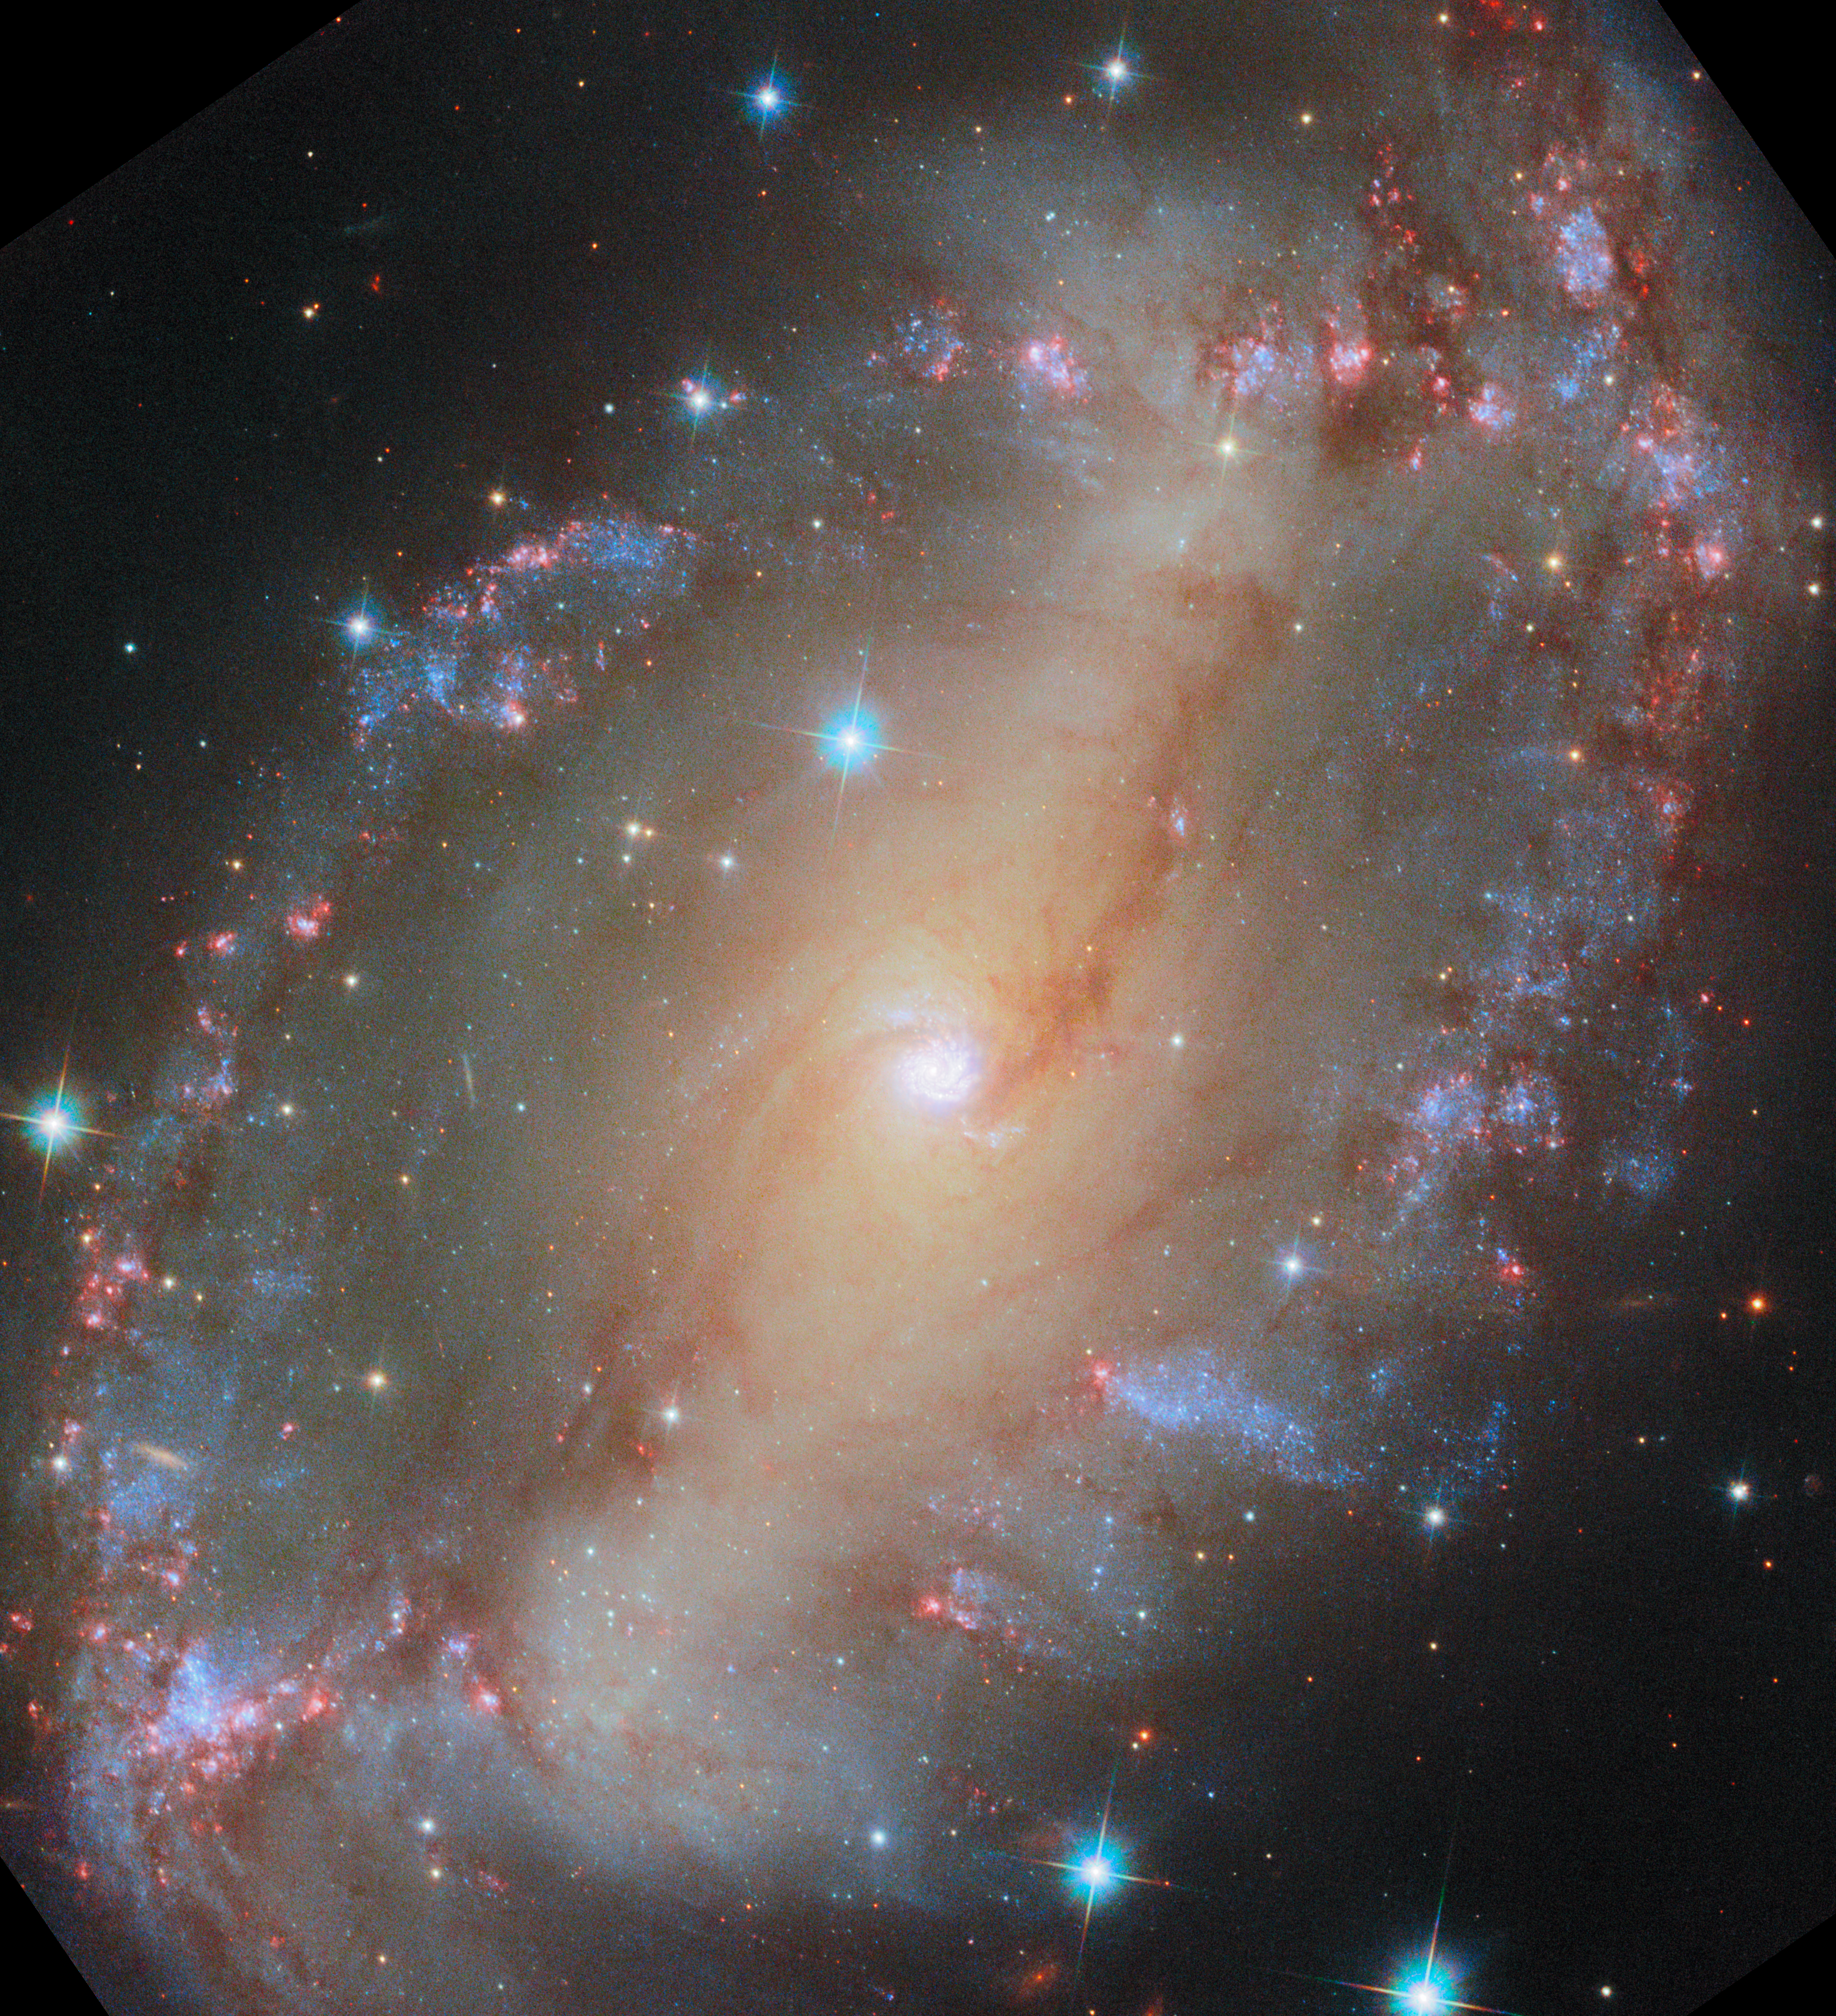

NGC 2566 (HST image)

This is a new NASA/ESA Hubble Space Telescope of the spiral galaxy NGC 2566, which sits 76 million light-years away in the constellation Puppis. A prominent bar of stars stretches across the centre of this galaxy, and spiral arms emerge from each end of the bar. Because NGC 2566 appears tilted from our perspective, its disc takes on an almond shape, giving the galaxy the appearance of a cosmic eye.

As NGC 2566 gazes at us, astronomers gaze right back, using Hubble to survey the galaxy’s star clusters and star-forming regions. The Hubble data are especially valuable for studying stars that are just a few million years old; these stars are bright at the ultraviolet and visible wavelengths to which Hubble is sensitive. Using these data, researchers will measure the ages of NGC 2566’s stars, helping to piece together the timeline of the galaxy’s star formation and the exchange of gas between star-forming clouds and stars themselves.

Several other astronomical observatories have examined NGC 2566, including the NASA/ESA/CSA James Webb Space Telescope. The Webb data complement this Hubble image, adding a view of NGC 2566’s warm, glowing dust to Hubble’s stellar portrait. At the long-wavelength end of the electromagnetic spectrum, NGC 2566 has also been observed by the Atacama Large Millimeter/submillimeter Array (ALMA). ALMA is a network of 66 radio telescopes that work together as one to capture detailed images of the clouds of gas in which stars form. Together, Hubble, Webb and ALMA provide an overview of the formation, lives and deaths of stars in galaxies across the Universe.

This image has been adjusted slightly to compare with the image from Webb. See the original Hubble image here.

Credit: ESA/Hubble & NASA, D. Thilker